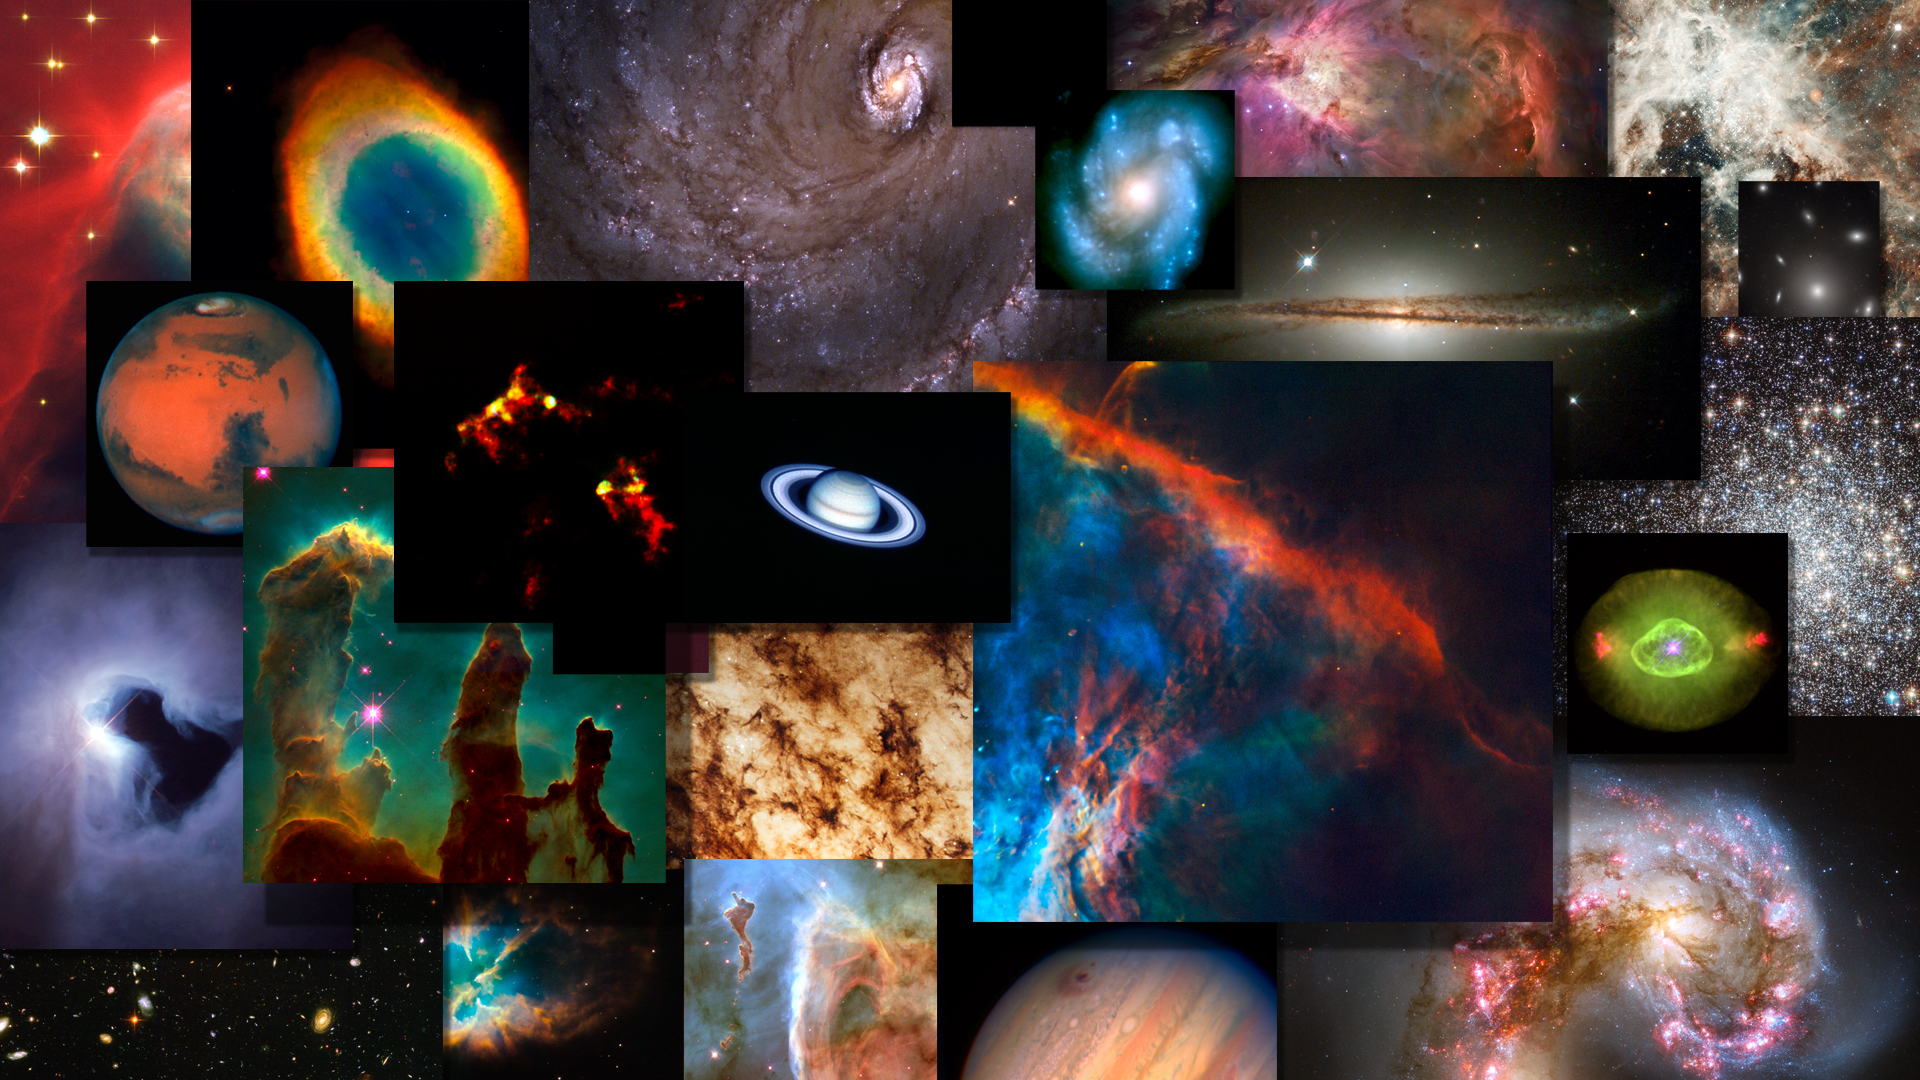

Screenshot of Hublecast 54

Watch the video here

Credit: NASA & ESA